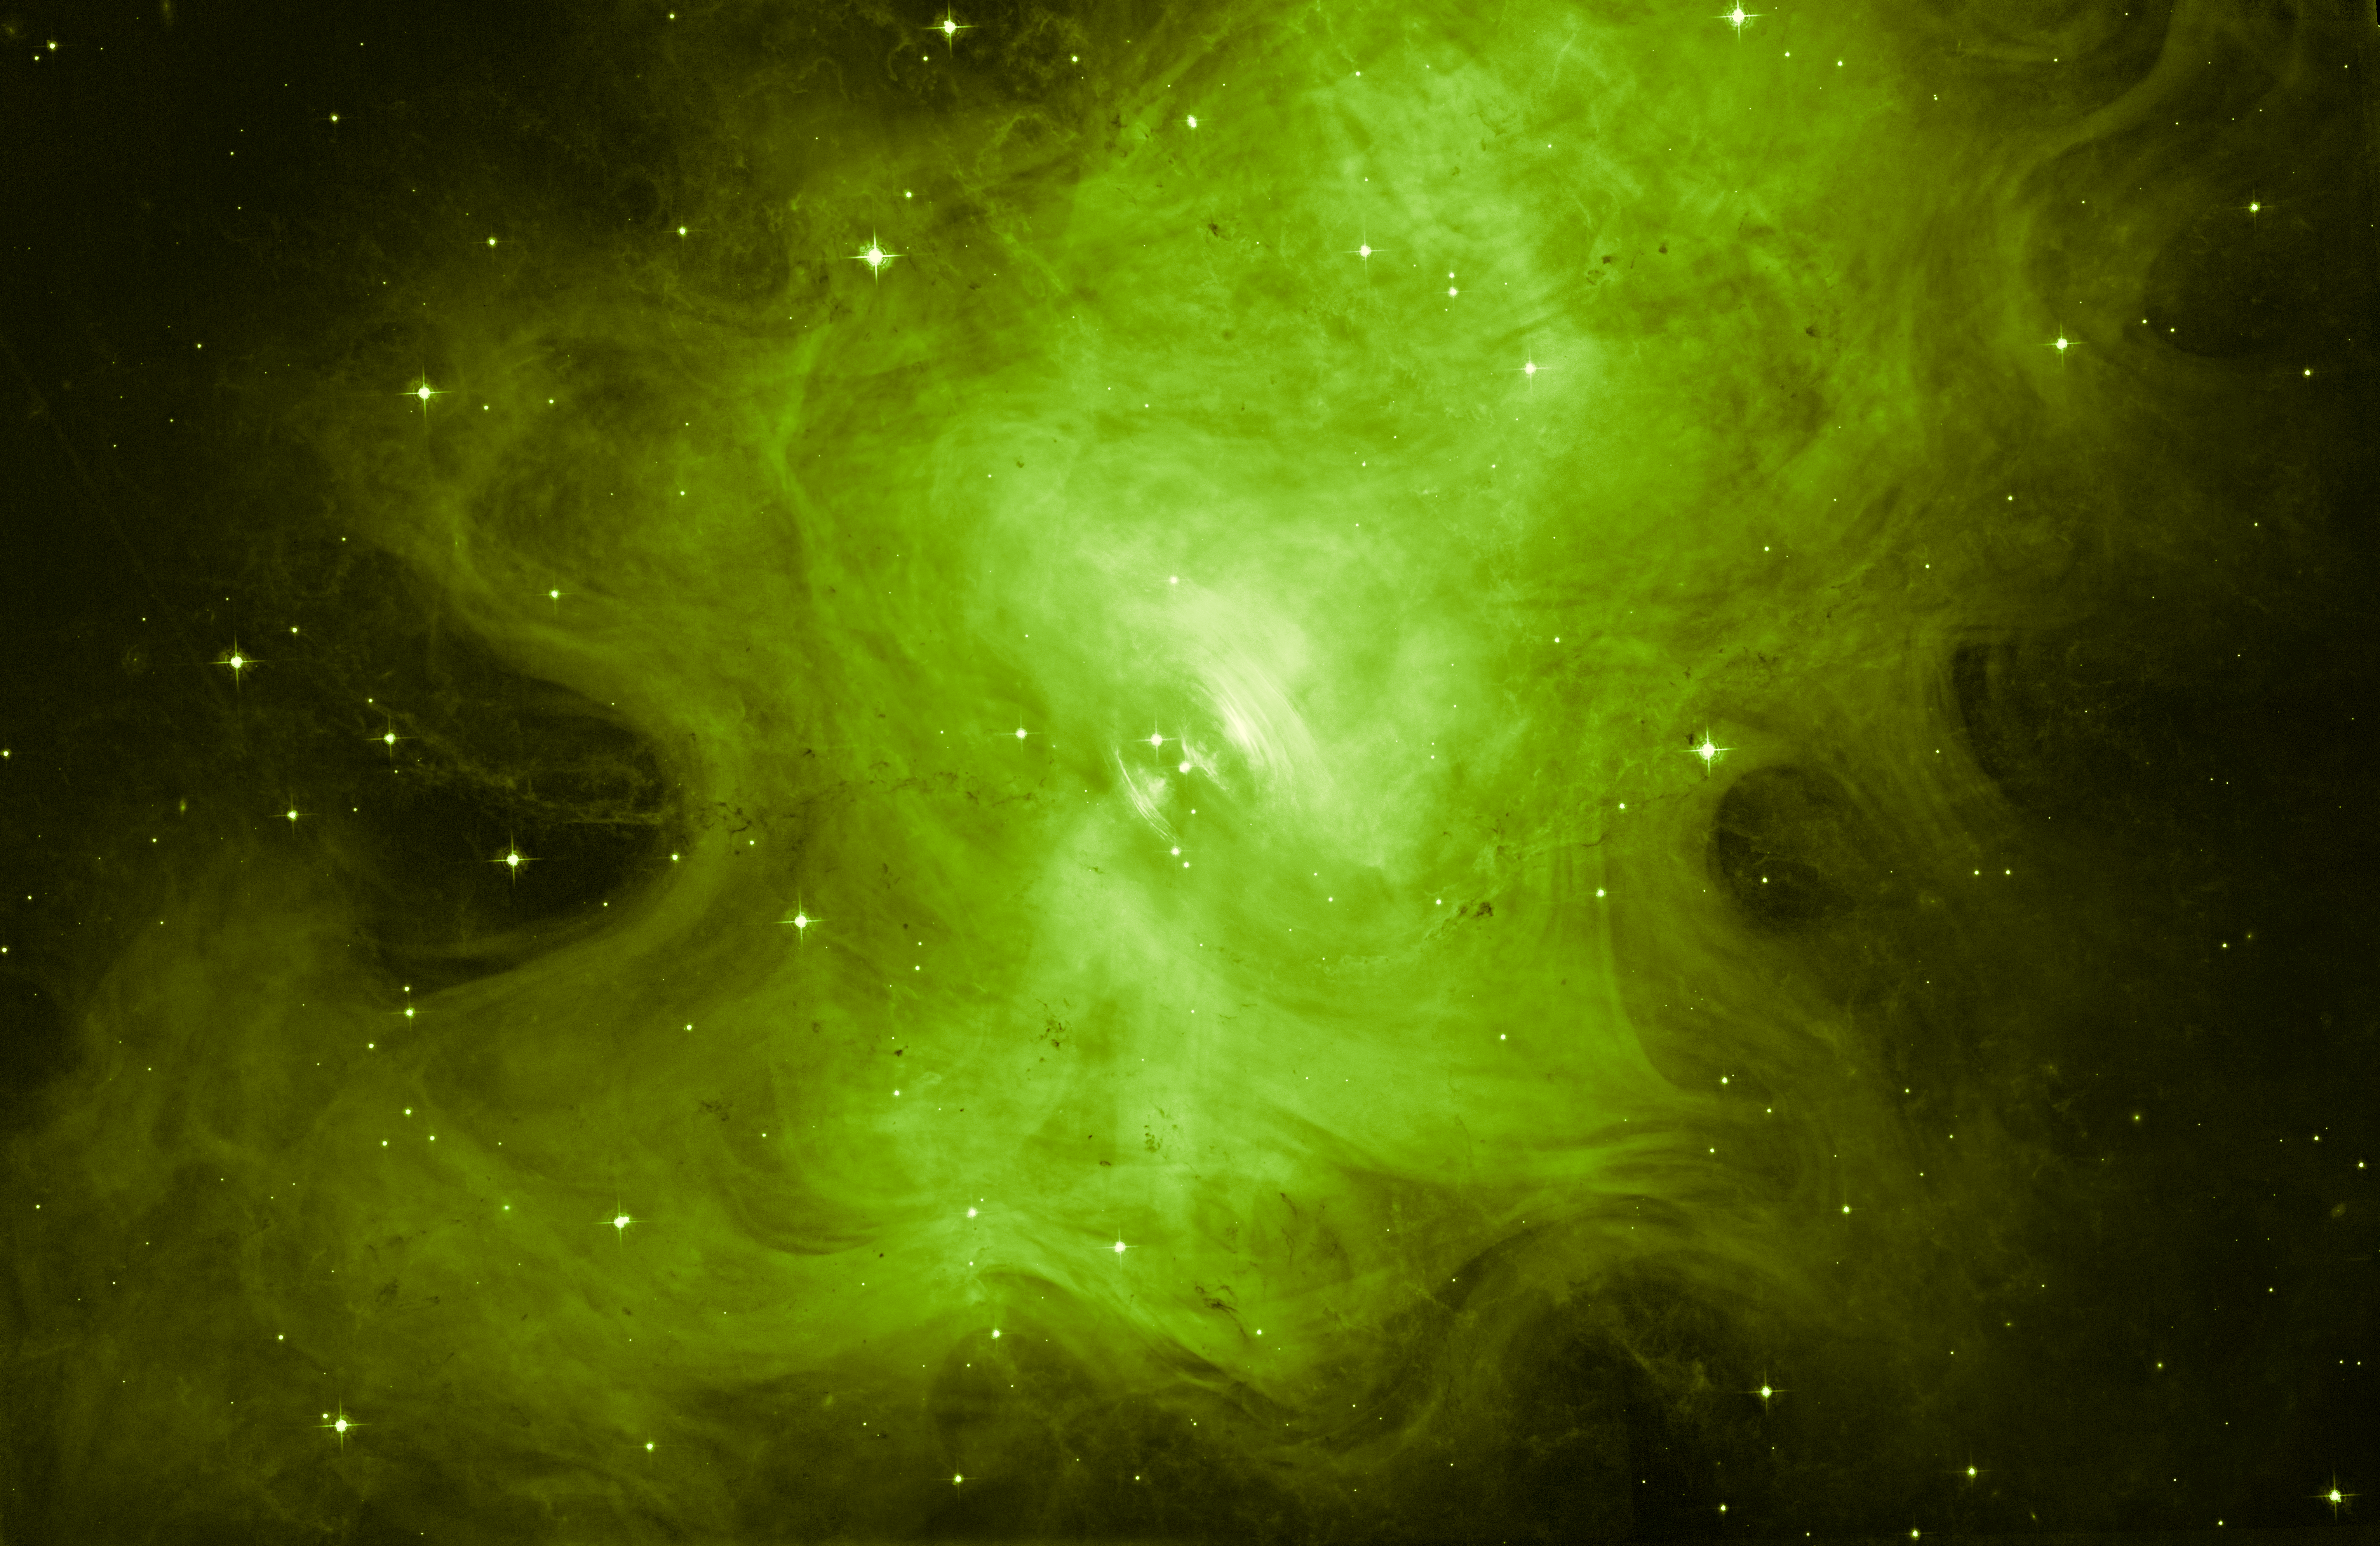

A whole new view of the Crab Nebula

In 1054 AD, during the Song dynasty, Chinese astronomers spotted a bright new star in the night sky. This newcomer turned out to be a violent explosion within the Milky Way, caused by the spectacular death of a star some 1600 light-years away. This explosion created one of the most well-studied and beautiful objects in the night sky — the Crab Nebula.

The beautiful result of this cataclysmic Type II supernova is shown here, imaged by the NASA/ESA Hubble Space Telescope’s Advanced Camera for Surveys. Unlike more commonly seen views of this remnant (heic0515), which show incredibly intricate branches and spires laced throughout the region, this image uses just a single filter, giving rise to a smoother and far simpler view of the famous nebula.

The unstoppable collapse of the Crab’s progenitor star led to the formation of a rapidly rotating neutron star named the Crab Pulsar, which lurks at the heart of the nebula. This object is roughly the same size as Mars’ small moon Phobos, but contains almost one and a half times the mass of the Sun, and whirls around thirty times every second. This causes jets of high-energy radiation to periodically sweep in the direction of Earth, like the spinning beams of a lighthouse, causing the Crab Nebula to appear to pulse at specific wavelengths.

The Crab Nebula is also known as NGC 1952 and Messier 1. The second of these names was assigned by Charles Messier. He initially misclassified the nebula with Halley’s Comet but soon he realised that the object did not move. Hence he decided to call it M1 as the first object of a catalogue of objects that look like comets but are not.

Credit: ESA/Hubble & NASA.
Acknowledgement: Judy Schmidt (Geckzilla)